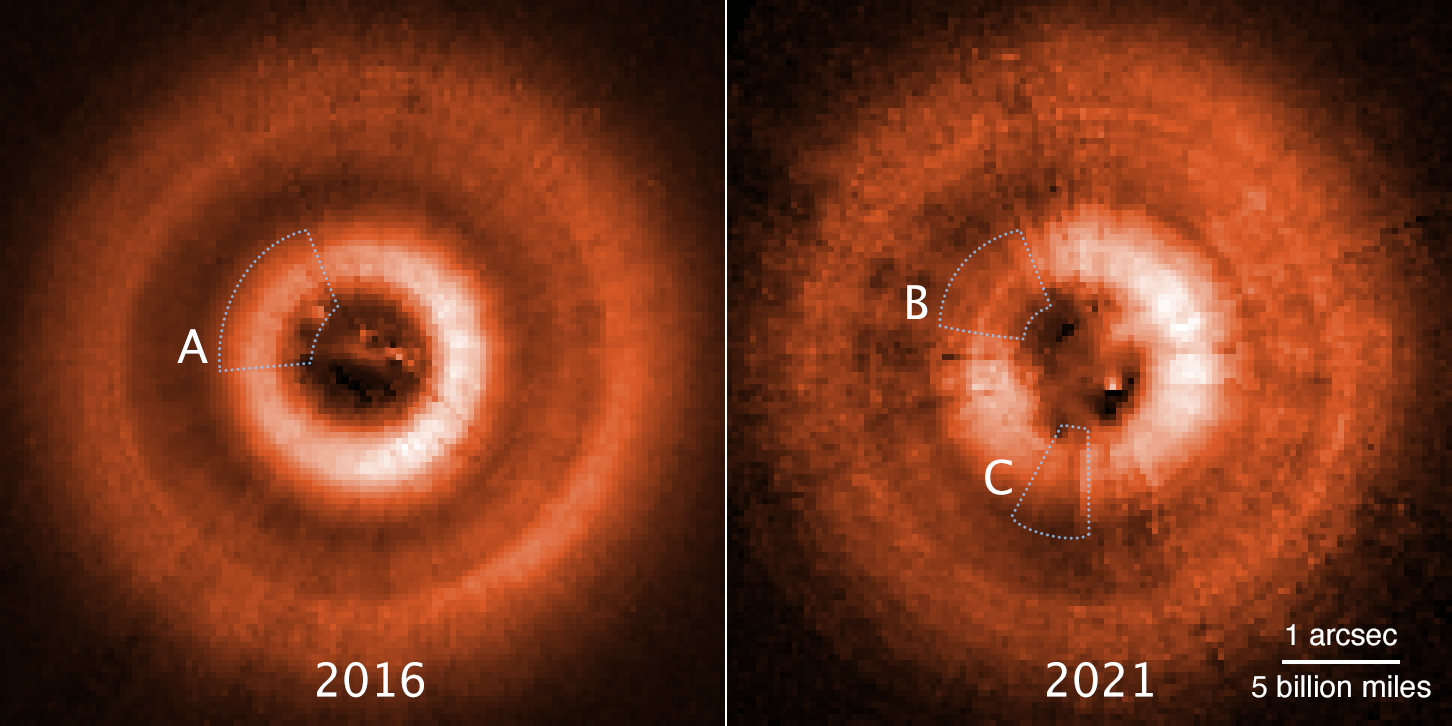

Hubble images TW Hydrae Disc Shadows (annotated)

Comparison images from the NASA/ESA Hubble Space Telescope, taken several years apart, have uncovered two eerie shadows moving counterclockwise across a disc of gas and dust encircling the young star TW Hydrae. The discs are tilted face-on as seen from Earth and so give astronomers a bird’s-eye view of what’s happening around the star. The left image, taken in 2016, shows just one shadow [A] at the 11 o’clock position. This shadow is cast by an inner disc that is slightly inclined to the outer disc and so blocks starlight. The picture on the left shows a second shadow that emerged from yet another nested disc at the 7 o’clock position, as photographed in 2021. What was originally the inner disc is marked [B] in this later view. The shadows rotate around the star at different rates like the hand on a clock. They are evidence for two unseen planets that have pulled dust into their orbits. This makes them slightly inclined to each other. This is a visible-light photo taken with the Space Telescope Imaging Spectrograph. Artificial colour has been added to enhance details.

Credit: NASA, ESA, J. Debes STScI